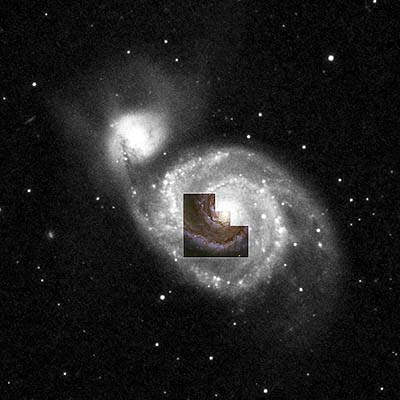

The whirlpool galaxy

The galaxy's massive center, the bright ball of light in the center of the photograph, is about 80 light-years across and has a brightness of about 100 million suns.

Astronomers estimate that it is about 400 million years old and has a mass 40 million times larger than our Sun.

The concentration of stars is about 5, 000 times higher than in our solar neighborhood, the Milky Way Galaxy. We would see a continuously bright sky if we lived near the bright center.

Credit: Nino Panagia ( Space Telescope Science Institute and European Space Agency) and NASA